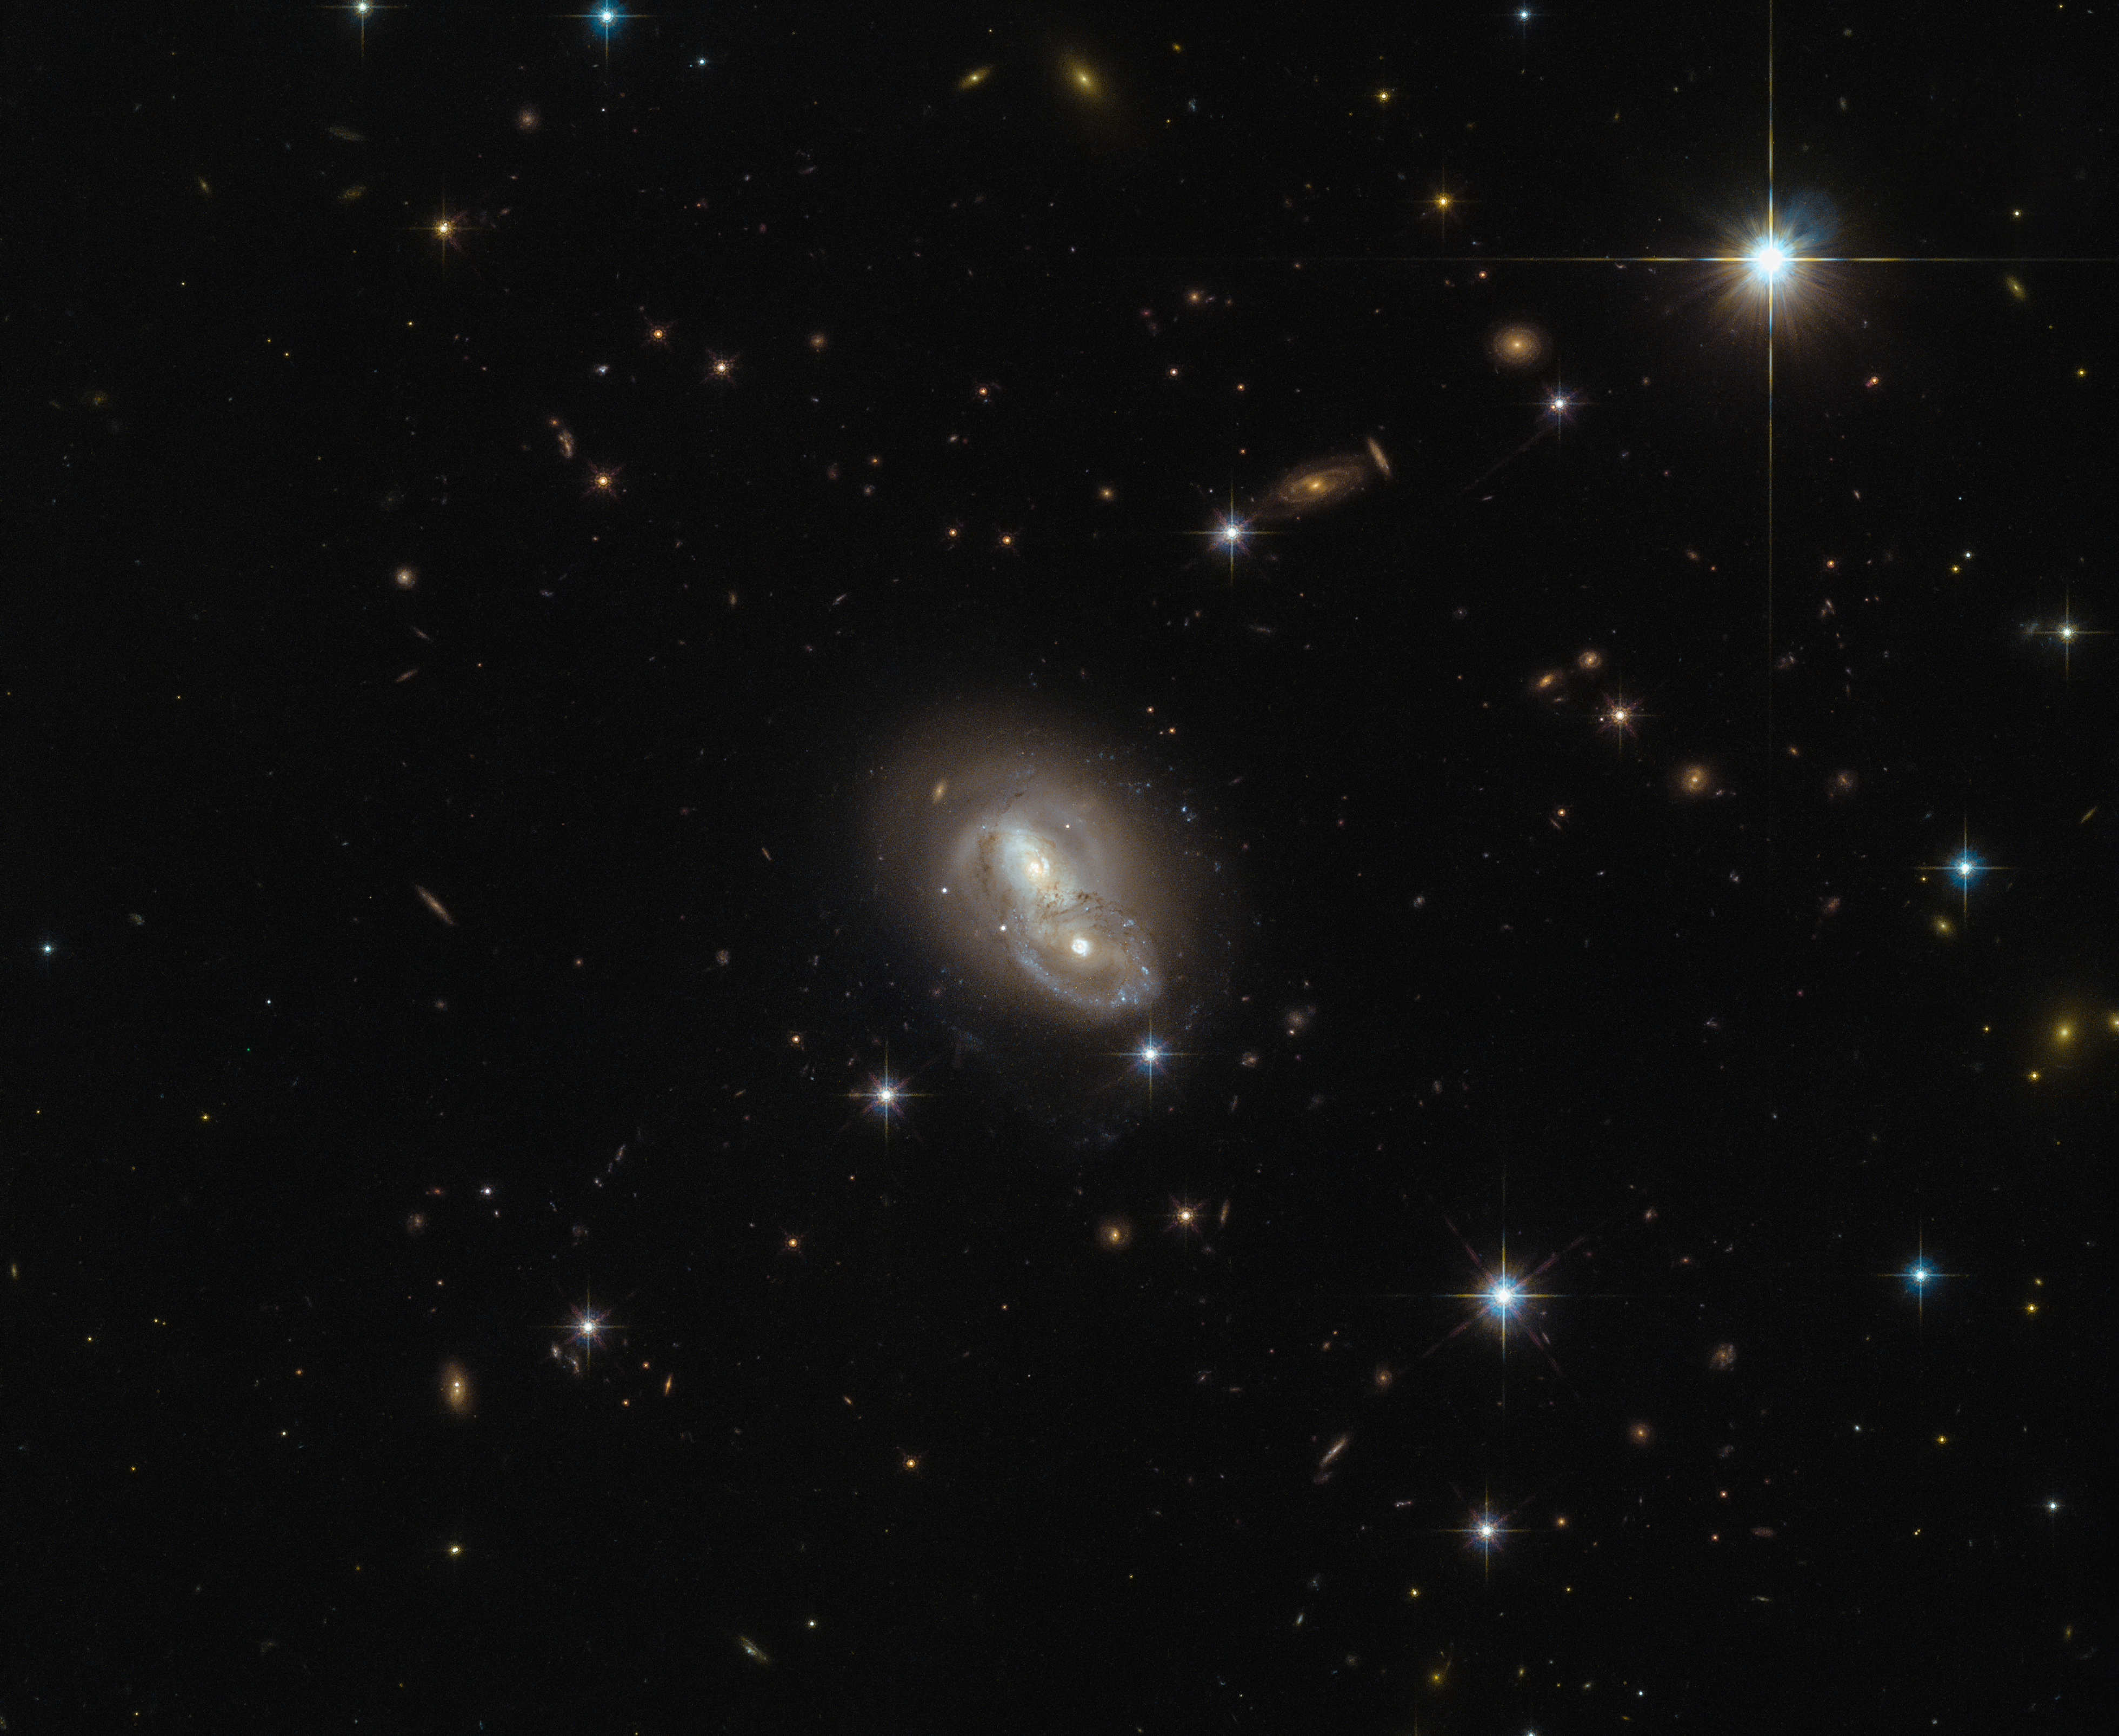

Close encounter

This image from the NASA/ESA Hubble Space Telescope shows the unusual galaxy IRAS 06076-2139, found in the constellation Lepus (The Hare). Hubble’s Wide Field Camera 3 (WFC3) and Advanced Camera for Surveys (ACS) instruments observed the galaxy from a distance of 500 million light-years.

This particular object stands out from the crowd by actually being composed of two separate galaxies rushing past each other at about 2 million kilometres per hour. This speed is most likely too fast for them to merge and form a single galaxy. However, because of their small separation of only about 20 000 light-years, the galaxies will distort one another through the force of gravity while passing each other, changing their structures on a grand scale.

Such galactic interactions are a common sight for Hubble, and have long been a field of study for astronomers. The intriguing behaviours of interacting galaxies take many forms; galactic cannibalism, galaxy harassment and even galaxy collisions. The Milky Way itself will eventually fall victim to the latter, merging with the Andromeda Galaxy in about 4.5 billion years. The fate of our galaxy shouldn’t be alarming though: whilst galaxies are populated by billions of stars, the distances between individual stars are so large that hardly any stellar collisions will occur.

Credit: ESA/Hubble & NASA